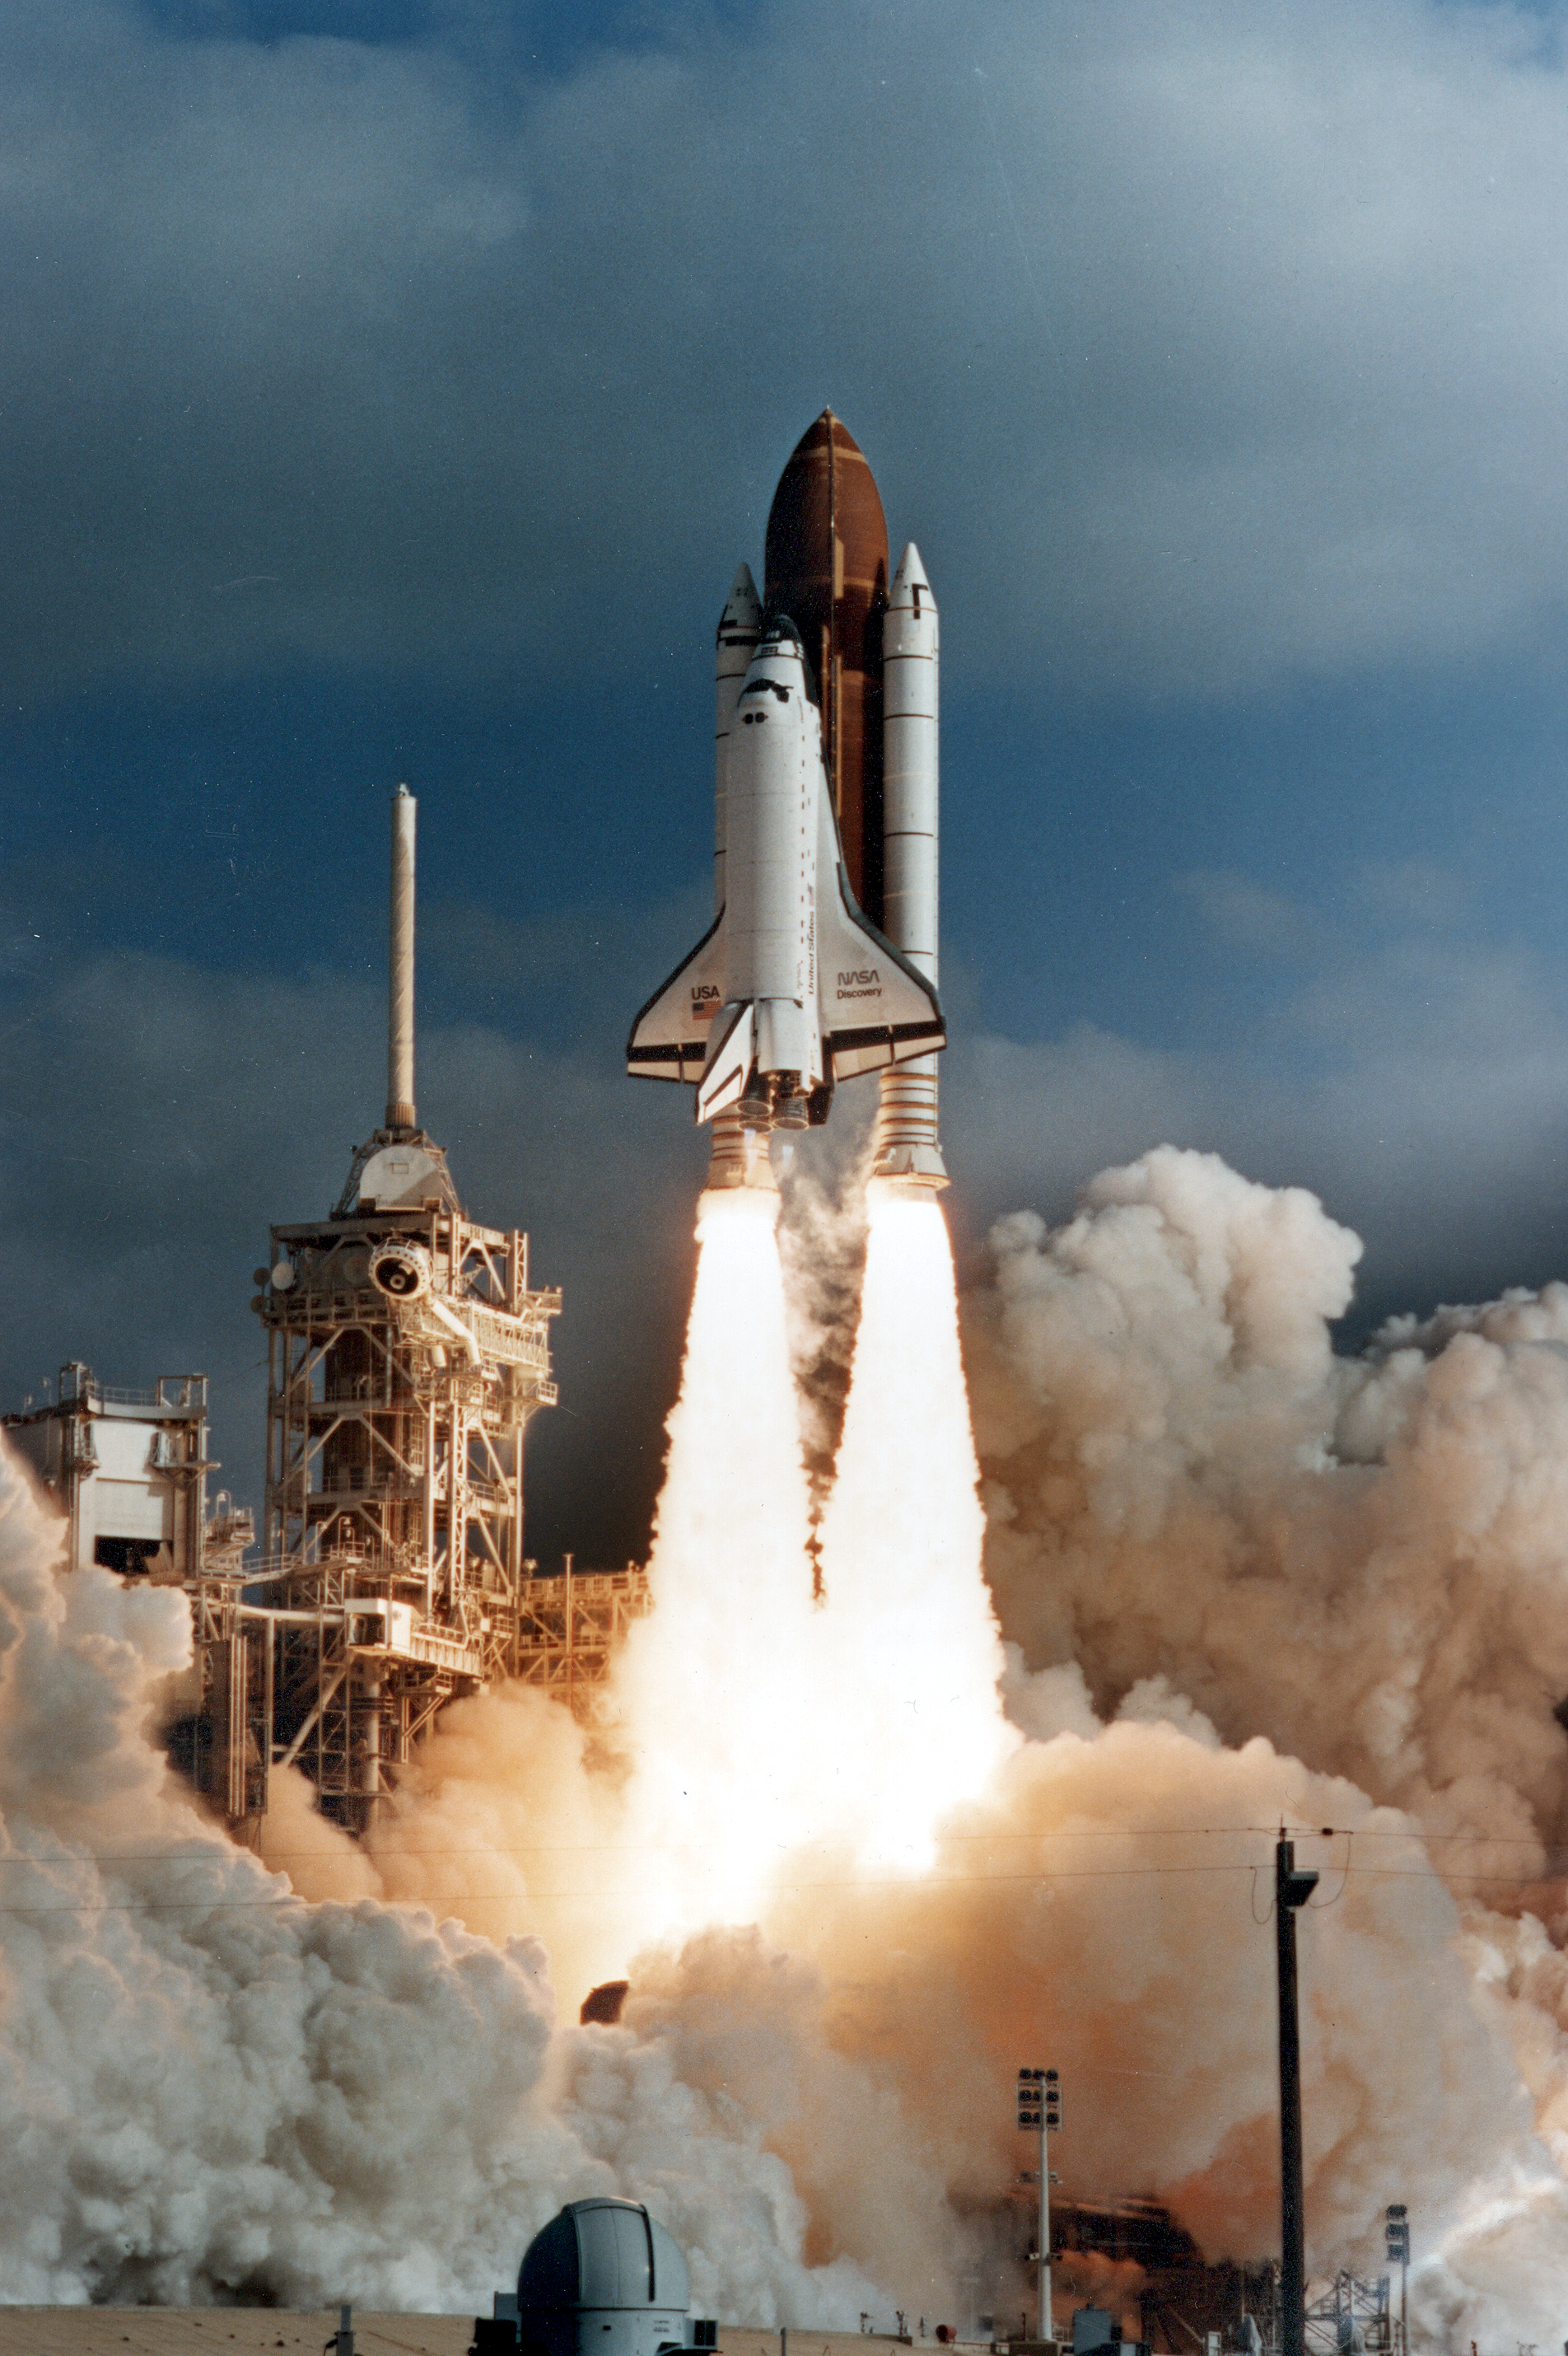

Hubble Launch

The Space Shuttle Discovery on it's way to space with the Hubble Space Telescope (HST).

Credit: NASA/ESA